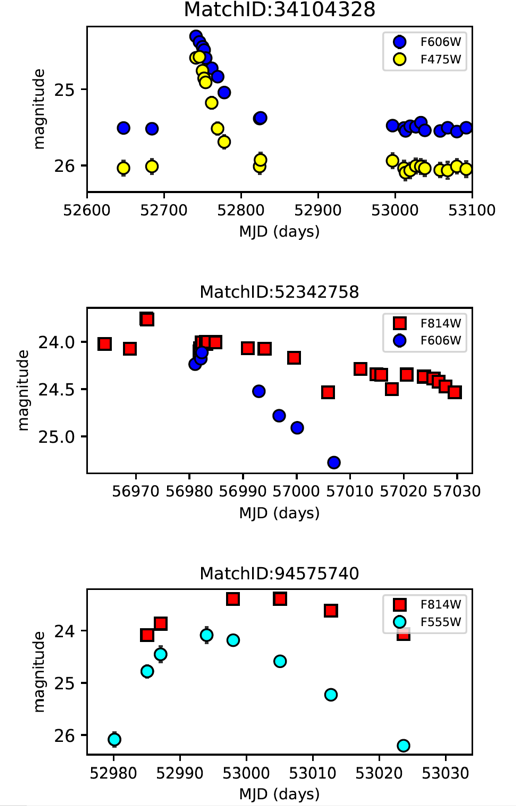

Figure 3: New transients in the HCV

HCV light curves of the newly discovered multi-filter transients in the fields of NGC 3314 (top), MACSJ1149.5+2223-HFFPAR (middle), and NGC 4258 (bottom).

Credit: ESA/Hubble, A. Bonanos